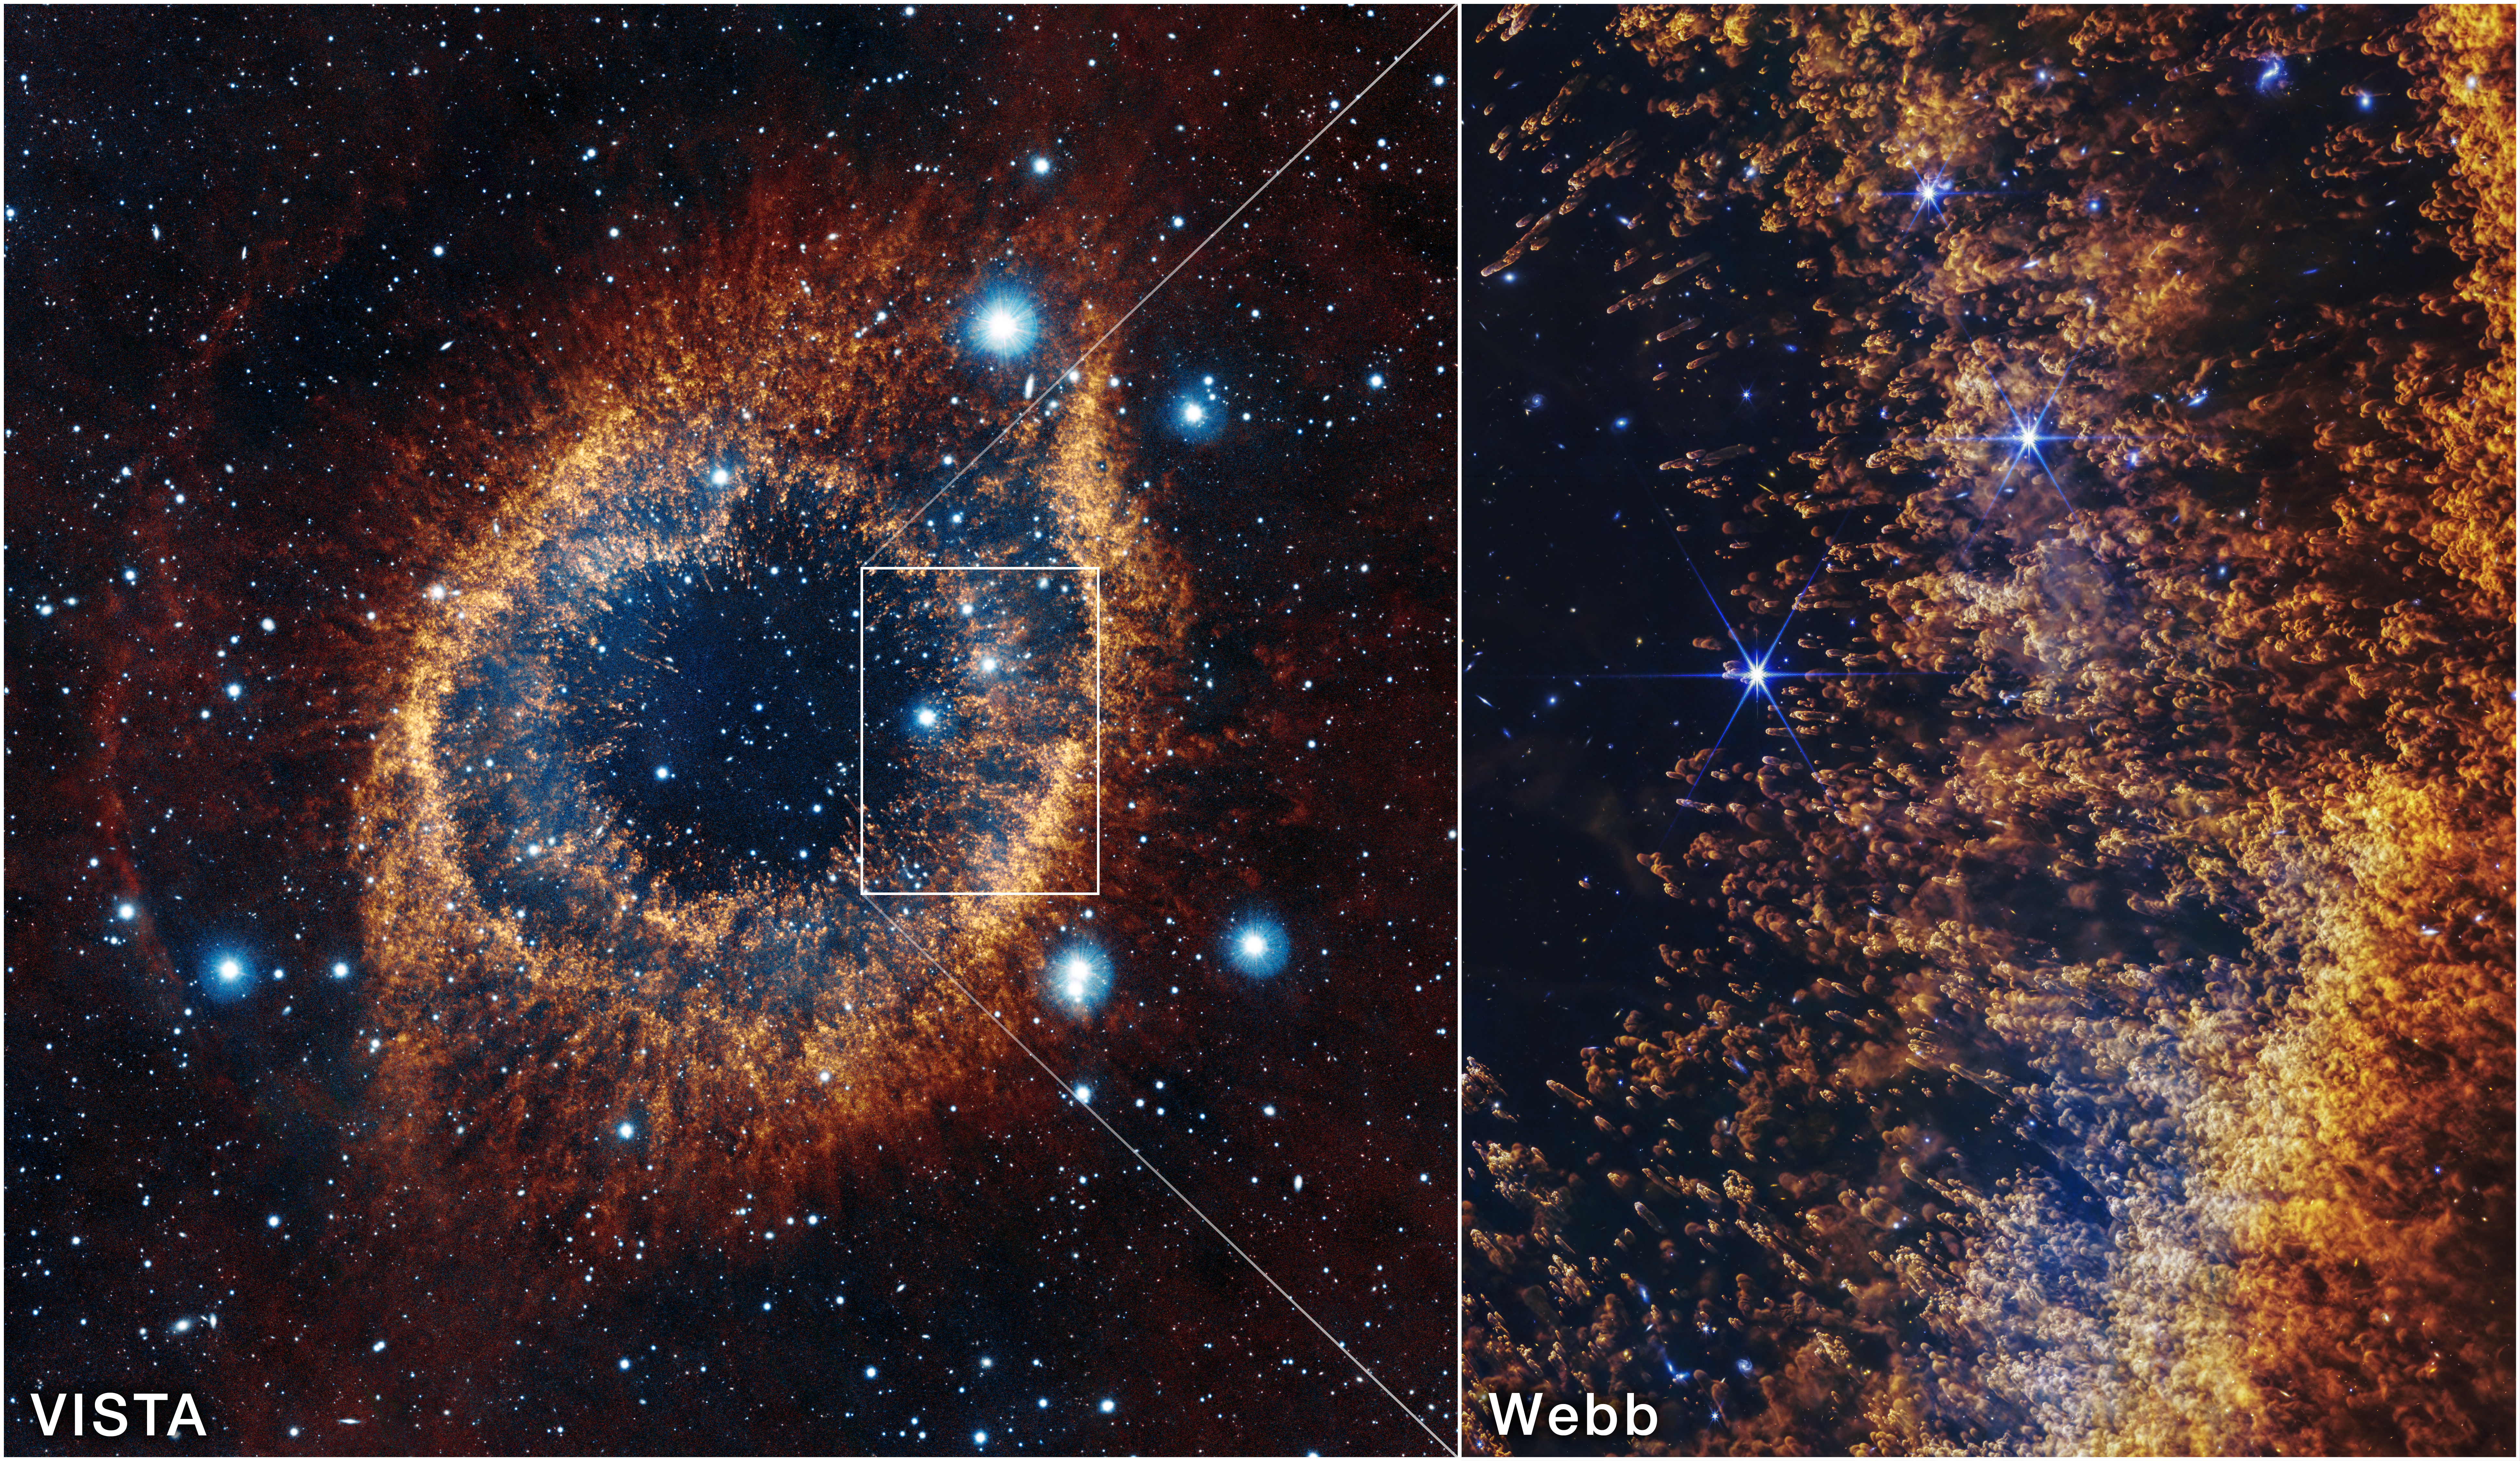

Helix Nebula (VISTA and Webb images)

This image of the Helix Nebula from the Visible and Infrared Telescope for Astronomy (left) shows the full view of the planetary nebula, with a box highlighting the smaller field of view from the James Webb Space Telescope’s NIRCam (right).

Credit: NASA, ESA, CSA, STScI, A. Pagan (STScI)